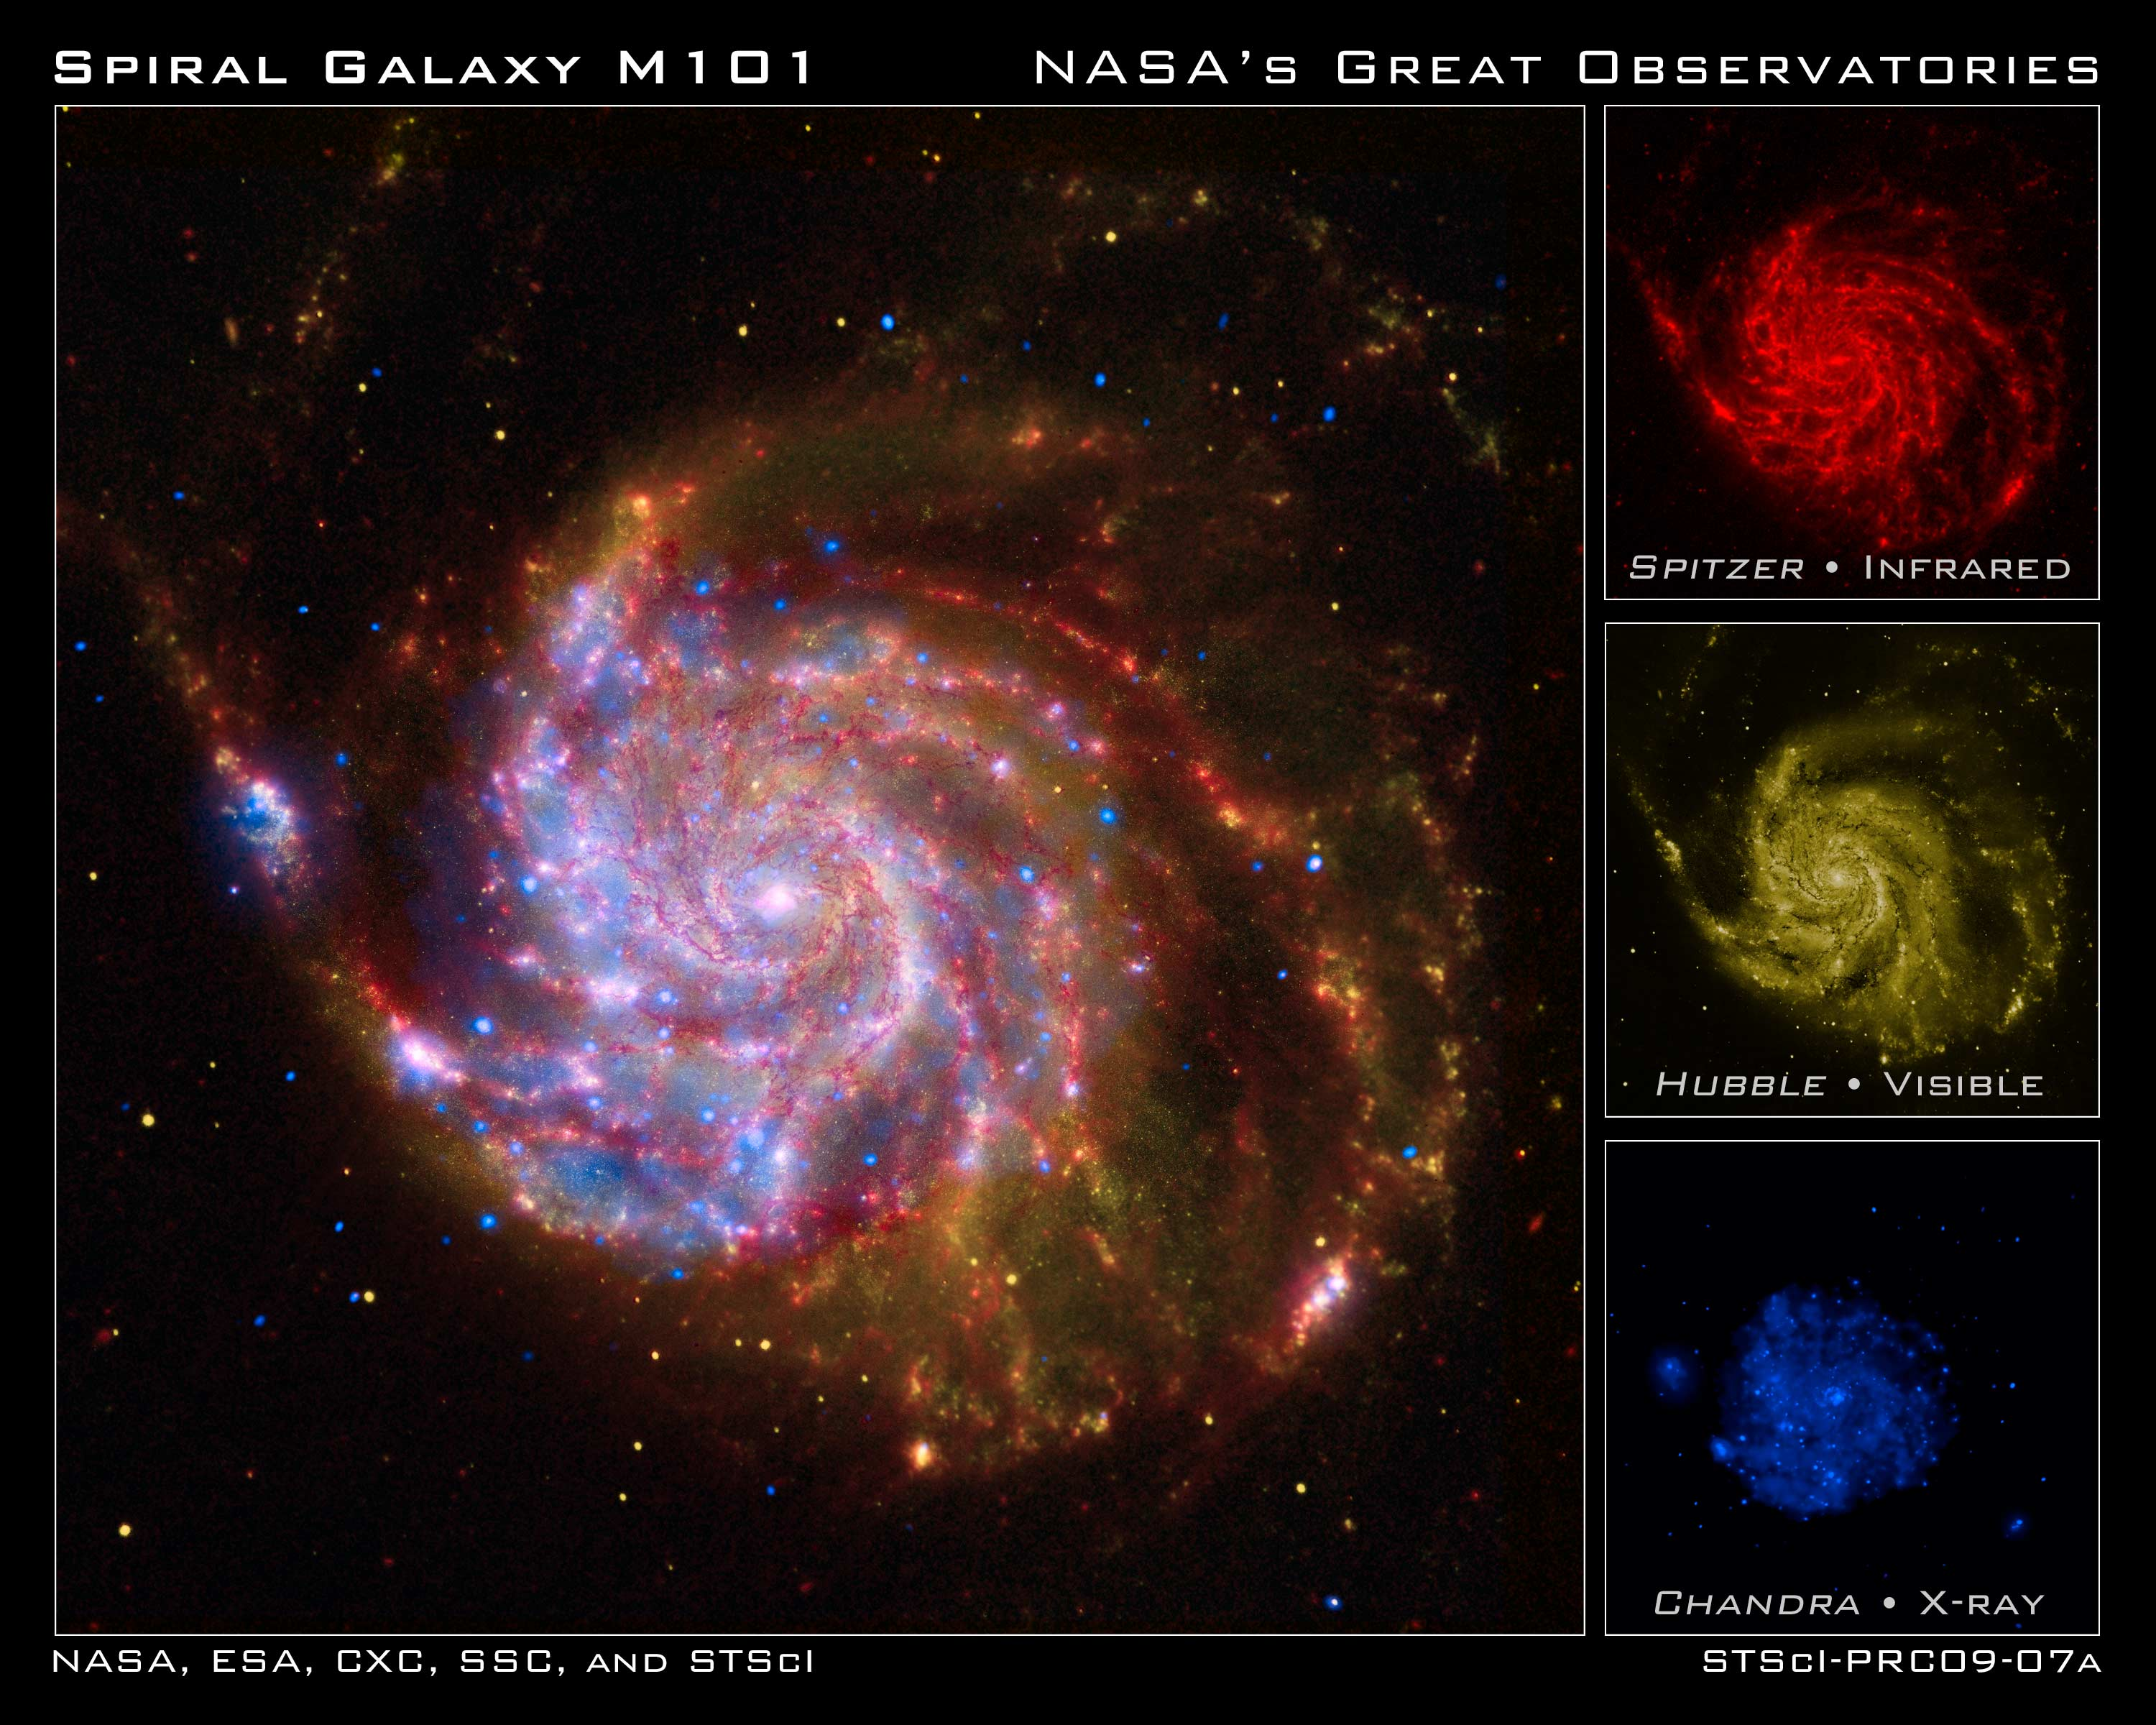

NASA's Great Observatories celebrate the International Year of Astronomy

In 1609, Galileo improved the newly invented telescope, turned it toward the heavens, and revolutionised our view of the Universe. In celebration of the 400th anniversary of this milestone, 2009 has been designated as the International Year of Astronomy.

Today, NASA's Great Observatories are continuing Galileo's legacy with stunning images and breakthrough science from the Hubble Space Telescope, the Spitzer Space Telescope, and the Chandra X-ray Observatory.

While Galileo observed the sky using visible light seen by the human eye, technology now allows us to observe in many wavelengths, including Spitzer's infrared view and Chandra's view in X-rays. Each wavelength region shows different aspects of celestial objects and often reveals new objects that could not otherwise be studied.

This image of the spiral galaxy Messier 101 is a composite of views from Spitzer, Hubble, and Chandra.

The red colour shows Spitzer's view in infrared light. It highlights the heat emitted by dust lanes in the galaxy where stars can form.
The yellow colour is Hubble's view in visible light. Most of this light comes from stars, and they trace the same spiral structure as the dust lanes.

Such composite images allow astronomers to see how features seen in one wavelength match up with those seen in another wavelength. It's like seeing with a camera, night vision goggles, and X-ray vision all at once.

In the four centuries since Galileo, astronomy has changed dramatically. Yet our curiosity and quest for knowledge remain the same. So, too, does our wonder at the splendor of the Universe.

The International Year of Astronomy Great Observatories Image Unveiling is supported by the NASA Science Mission Directorate Astrophysics Division. The project is a collaboration between the Space Telescope Science Institute, the Spitzer Science Center, and the Chandra X-ray Center.

Credit: NASA, ESA, CXC, SSC and STScI